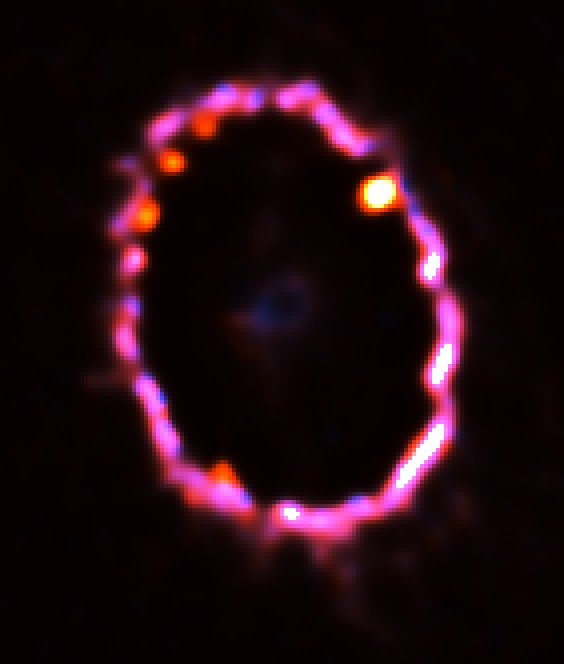

The Glowing Gas Ring around Supernova 1987A

This NASA/ESA Hubble Space Telescope Wide Field and Planetary Camera 2 image shows the glowing gas ring around supernova 1987A, as seen on February 2, 2000. The gas, excited by light from the explosion, has been fading for a decade, but parts of it are now being heated by the collision of an invisible shockwave from the supernova explosion.

Credit: NASA/ESA, Peter Challis and Robert Kirshner (Harvard-Smithsonian Center for Astrophysics), Peter Garnavich (University of Notre Dame) and the SINS collaboration